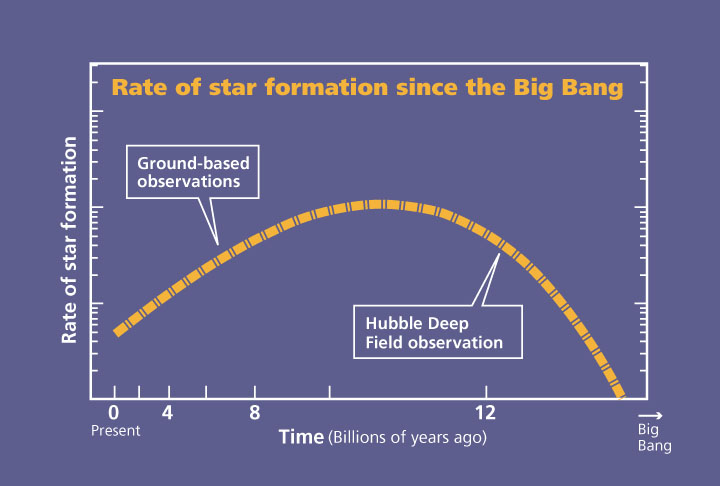

Plot of star formation rate since the Big Bang

Rates based on ground data and Hubble Deep Field data.

Credit: NASA & ESA